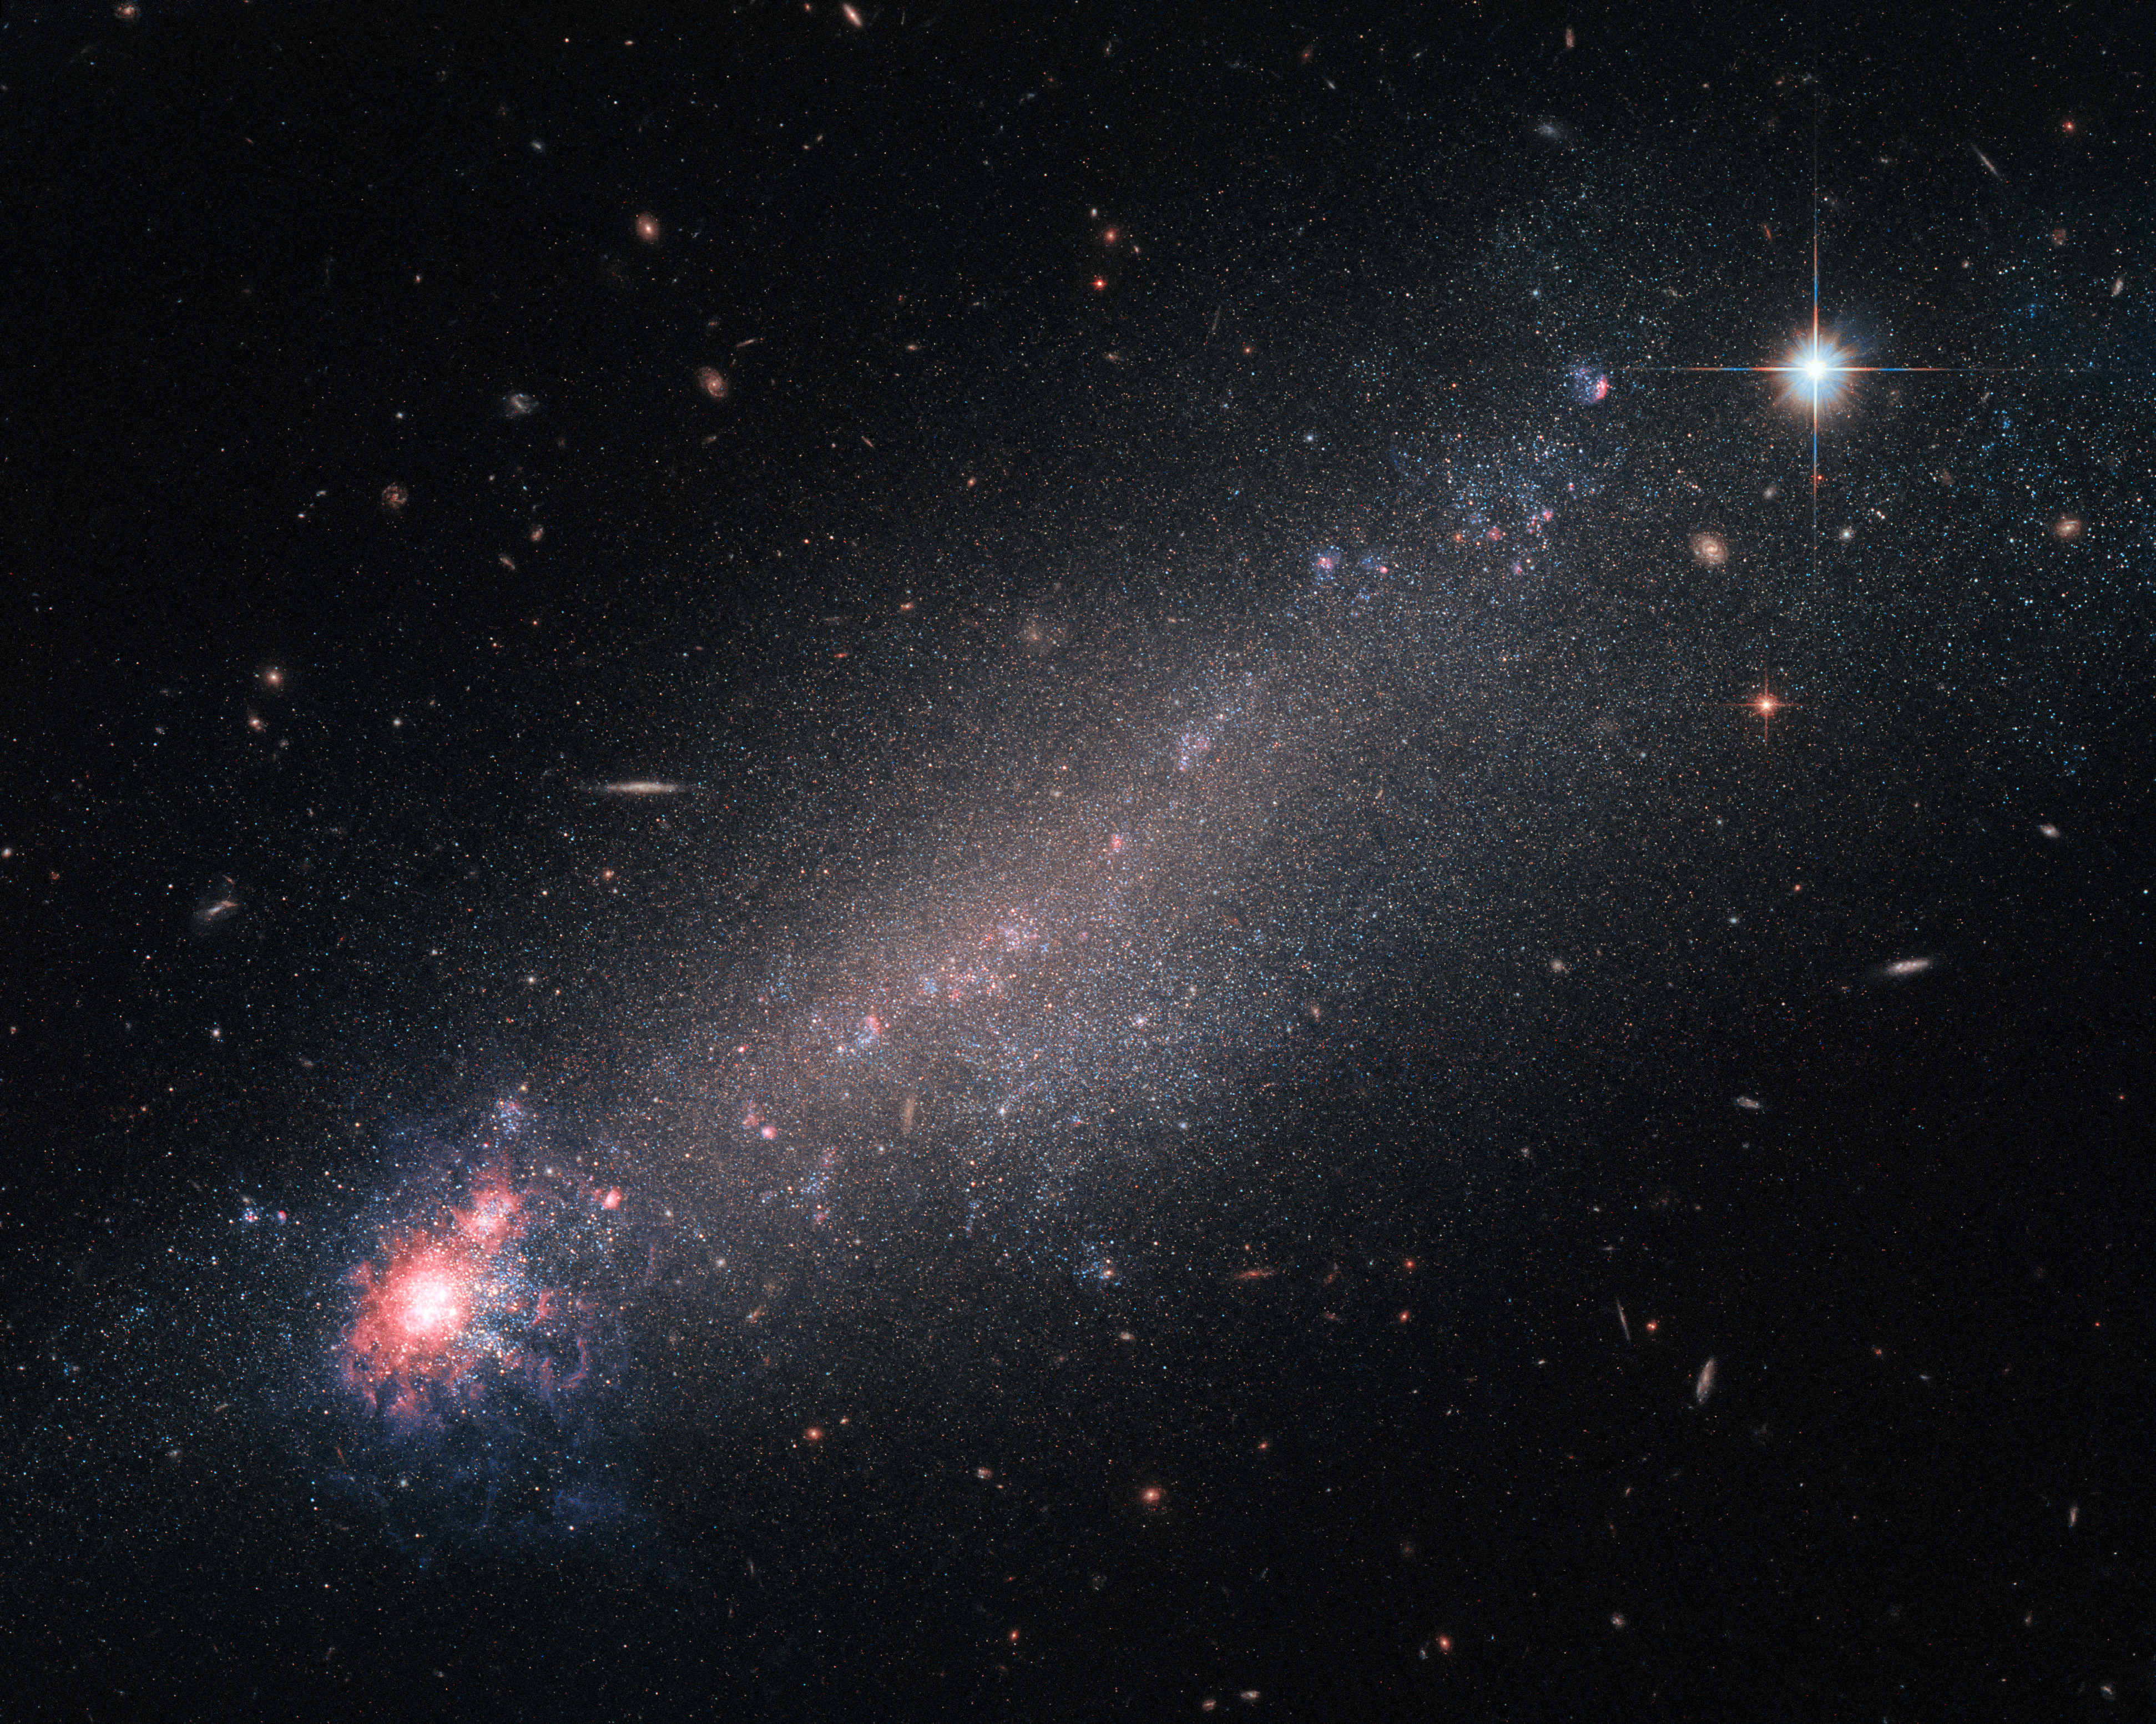

Starbirth with a chance of winds?

The lesser-known constellation of Canes Venatici (The Hunting Dogs), is home to a variety of deep-sky objects — including this beautiful galaxy, known as NGC 4861. Astronomers are still debating on how to classify it: While its physical properties — such as mass, size and rotational velocity — indicate it to be a spiral galaxy, its appearance looks more like a comet with its dense, luminous “head” and dimmer “tail” trailing behind. Features more fitting with a dwarf irregular galaxy.

Although small and messy, galaxies like NGC 4861 provide astronomers with interesting opportunities for study. Small galaxies have lower gravitational potentials, which simply means that it takes less energy to move stuff about inside them than it does in other galaxies. As a result, moving in, around, and through such a tiny galaxy is quite easy to do, making them far more likely to be suffused with streams and outflows of speedy charged particles known as galactic winds, which can flood such galaxies with little effort.

These galactic winds can be powered by the ongoing process of star formation, which involves huge amounts of energy. New stars are springing into life within the bright, colourful ‘head’ of NGC 4861 and ejecting streams of high-speed particles as they do so, which flood outwards to join the wider galactic wind. While NGC 4861 would be a perfect candidate to study such winds, recent studies did not find any galactic winds in it.

Credit: ESA/Hubble & NASA